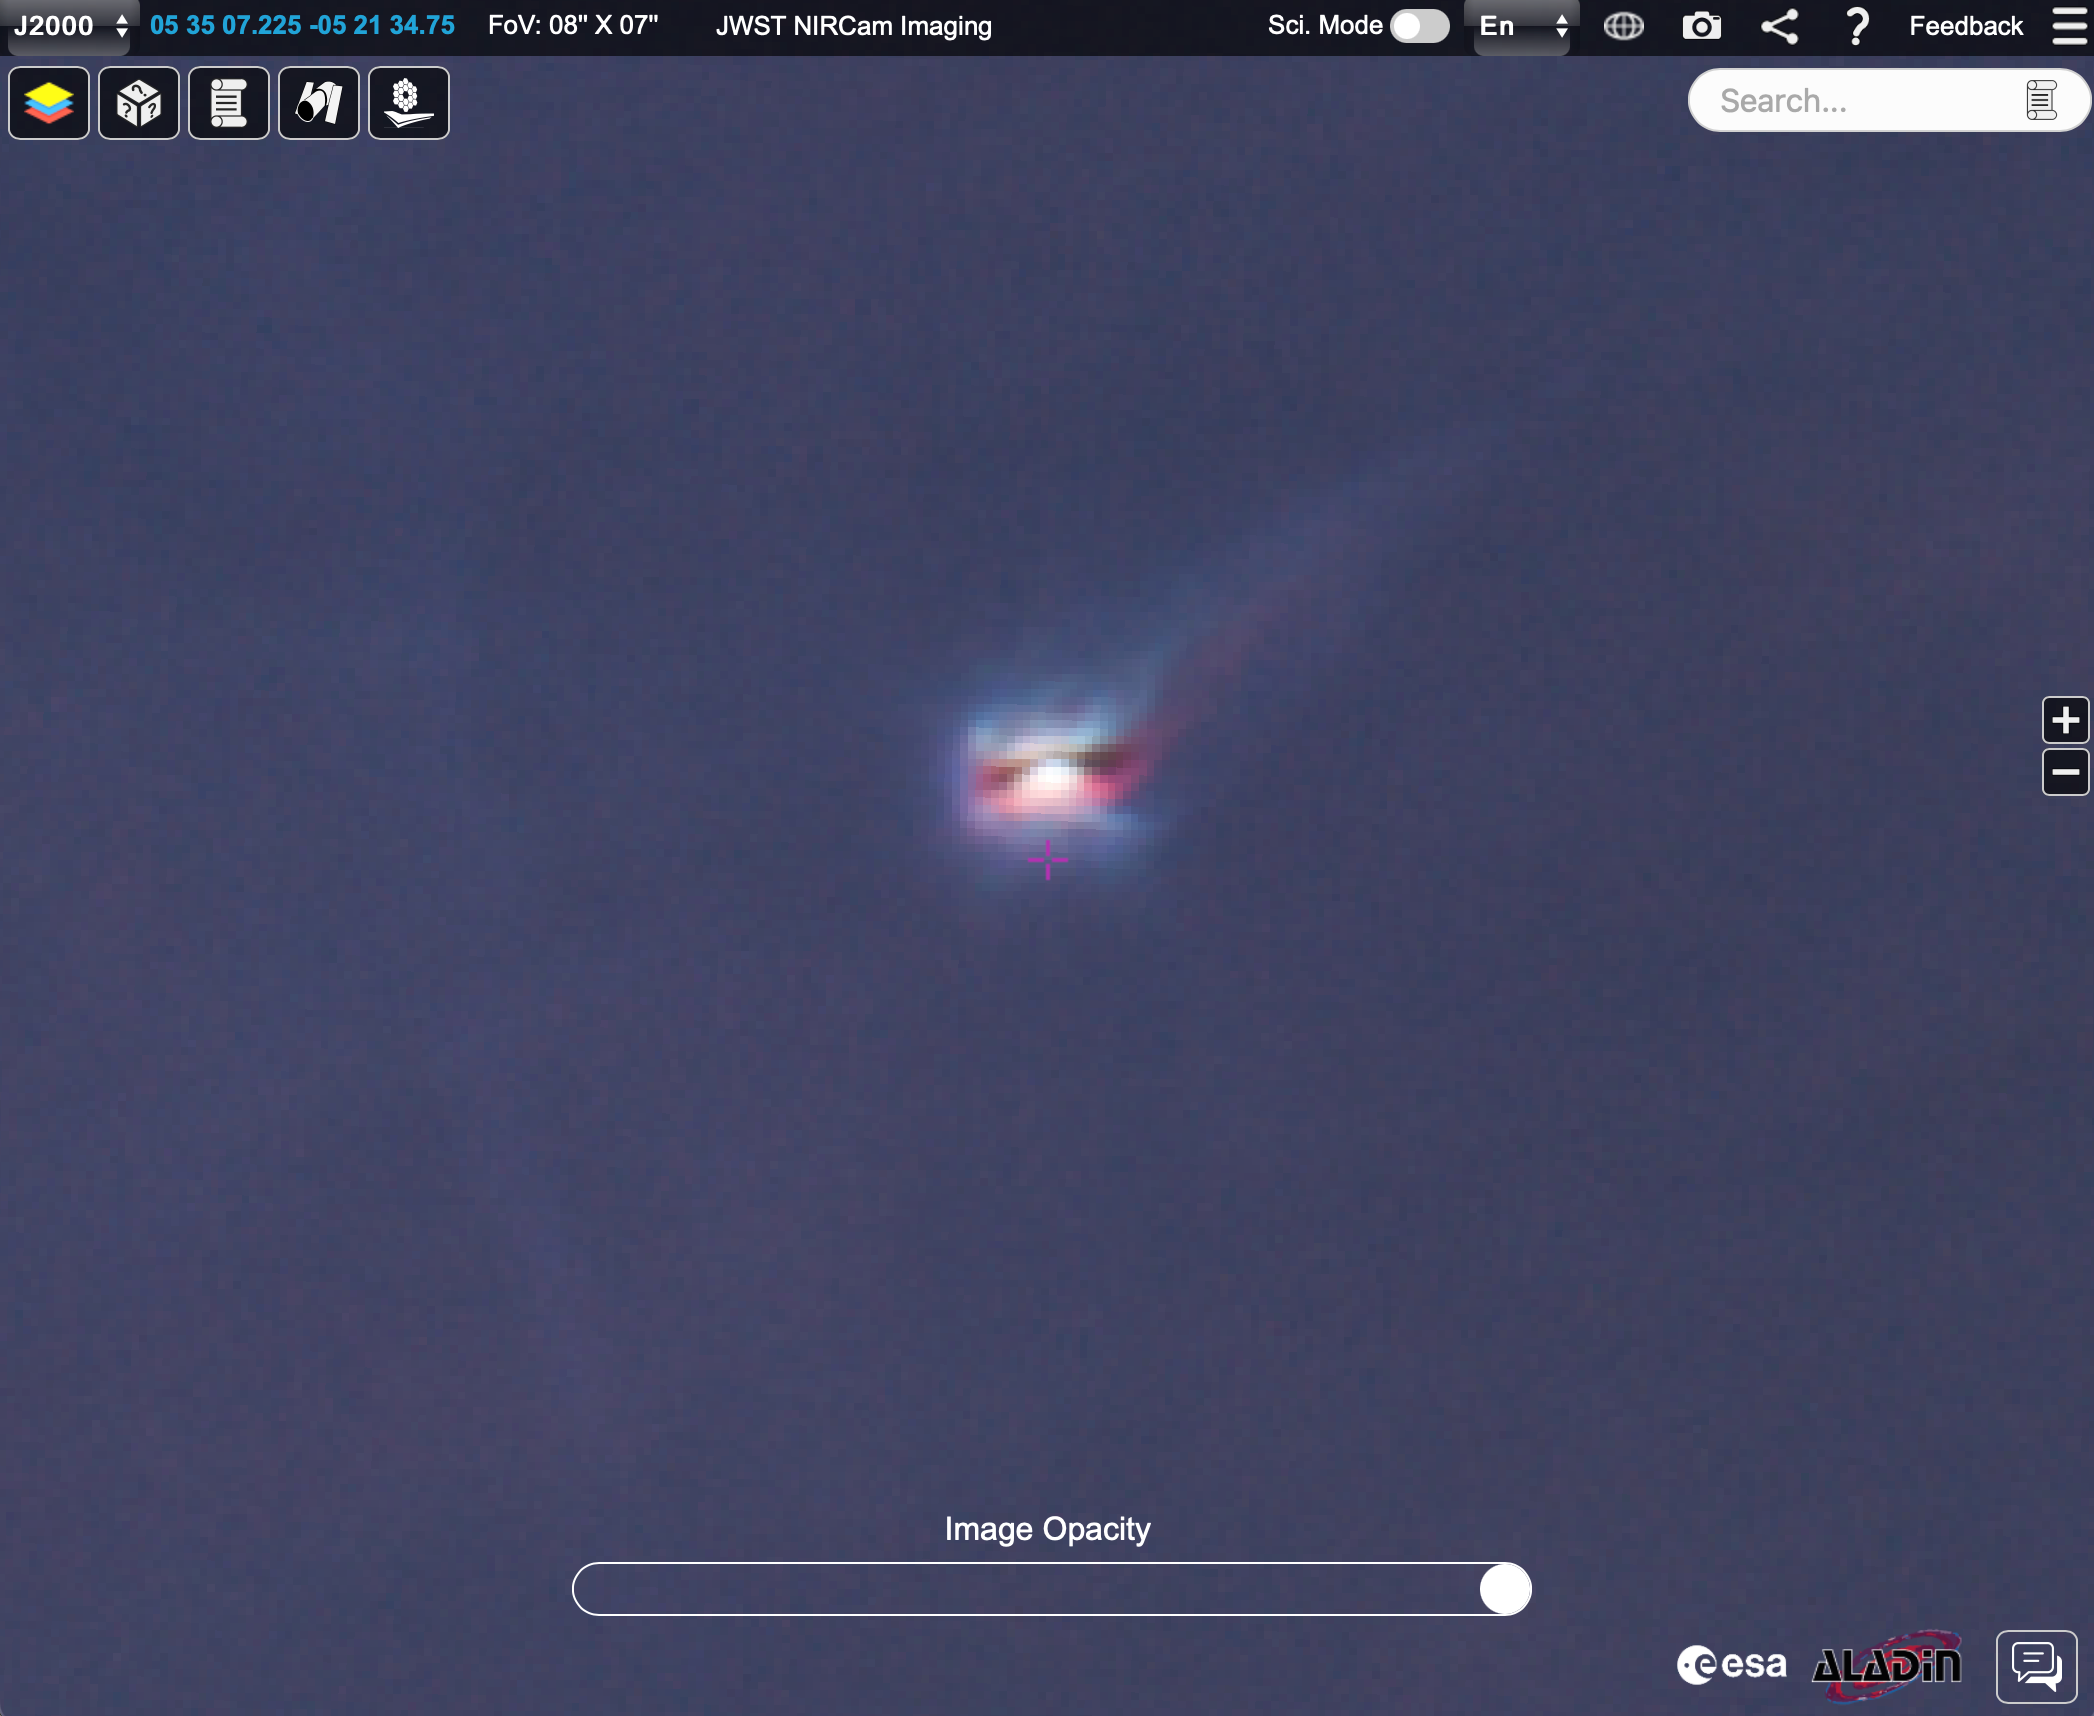

d072-135 in short-wavelength NIRCam Orion mosaic in ESASky

This is a screenshot from the ESA Sky platform showing d072-135, one of the interesting objects in the short-wavelength mosaic. This shows a circumstellar disk as a silhouette against the background nebula, being heated and evaporated by the Trapezium stars, forming a colourful tail of molecular and ionised gas. The image can be viewed on ESA Sky here.

Credit: NASA, ESA, CSAScience leads and image processing: M. McCaughrean, S. Pearson